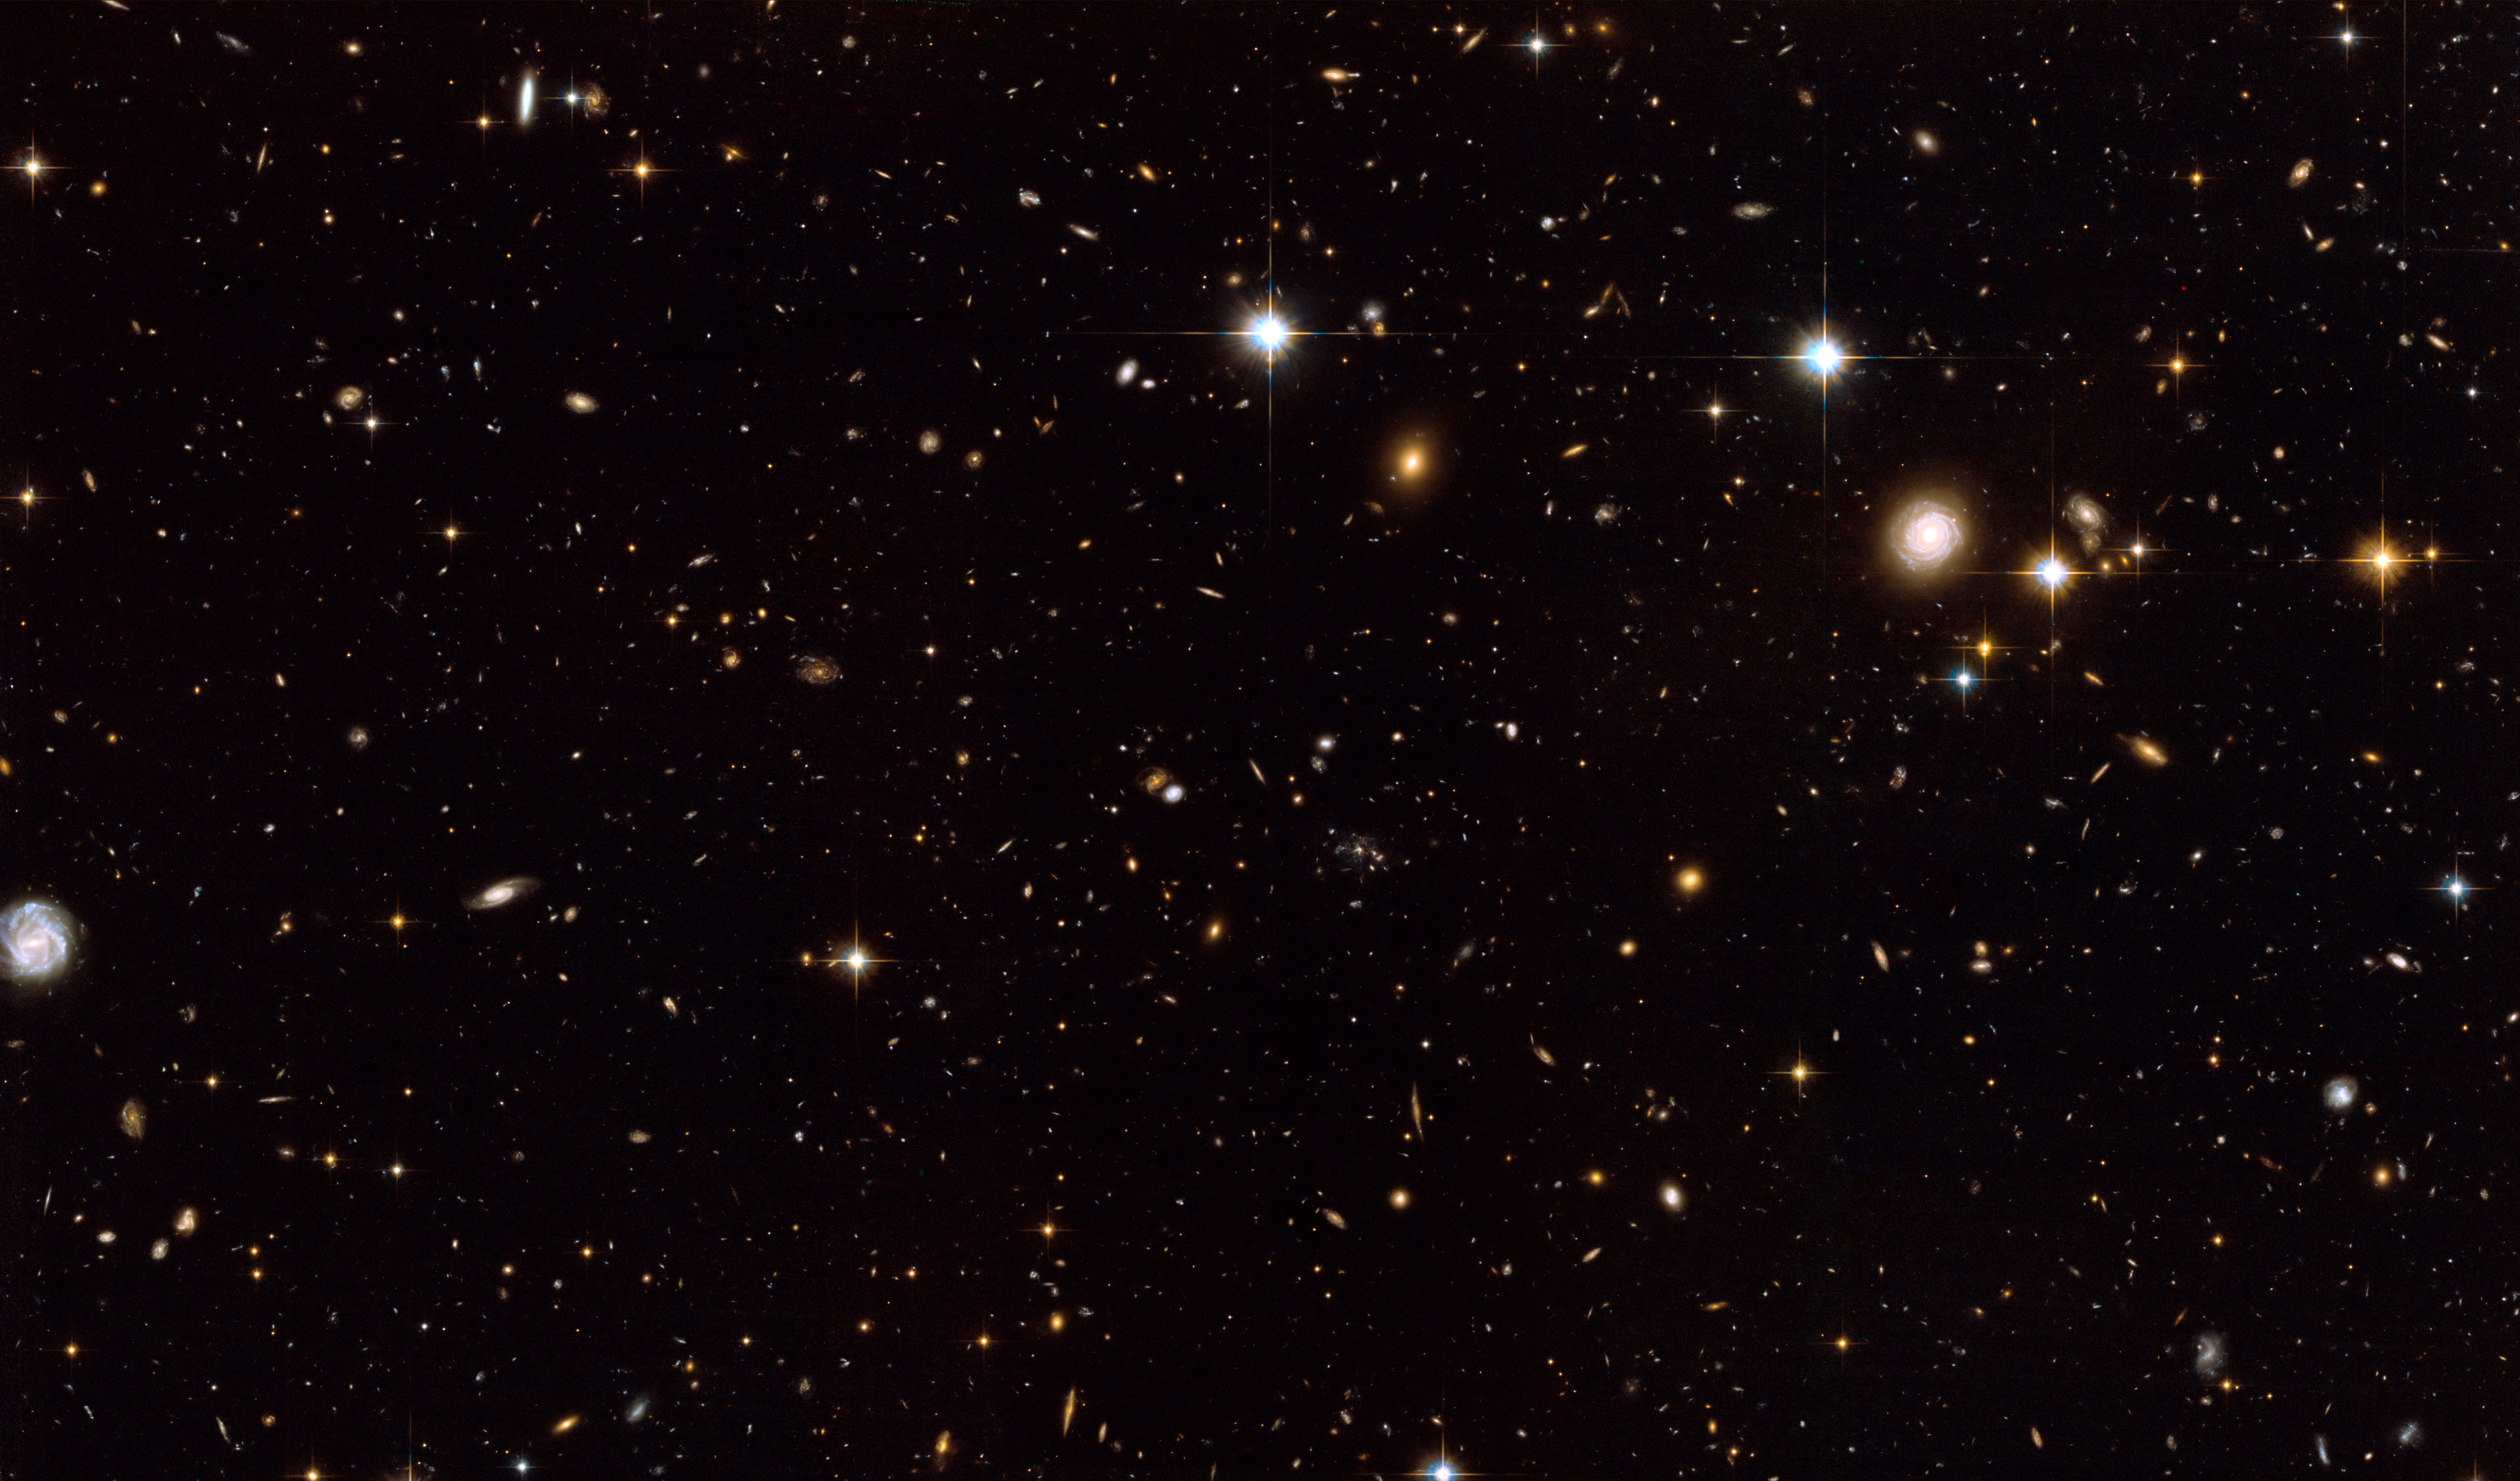

The Spiderweb Galaxy and its surroundings [full ACS view]

This image shows the full ACS overview of the region around the Spiderweb Galaxy (just to the right of the center). The galaxy is sitting at the centre of an emergent galaxy cluster, surrounded by hundreds of other galaxies from the cluster.

Credit: NASA, ESA, G. Miley and R. Overzier (Leiden Observatory), and the ACS Science Team
Acknowledgement: Davide De Martin (ESA/Hubble).